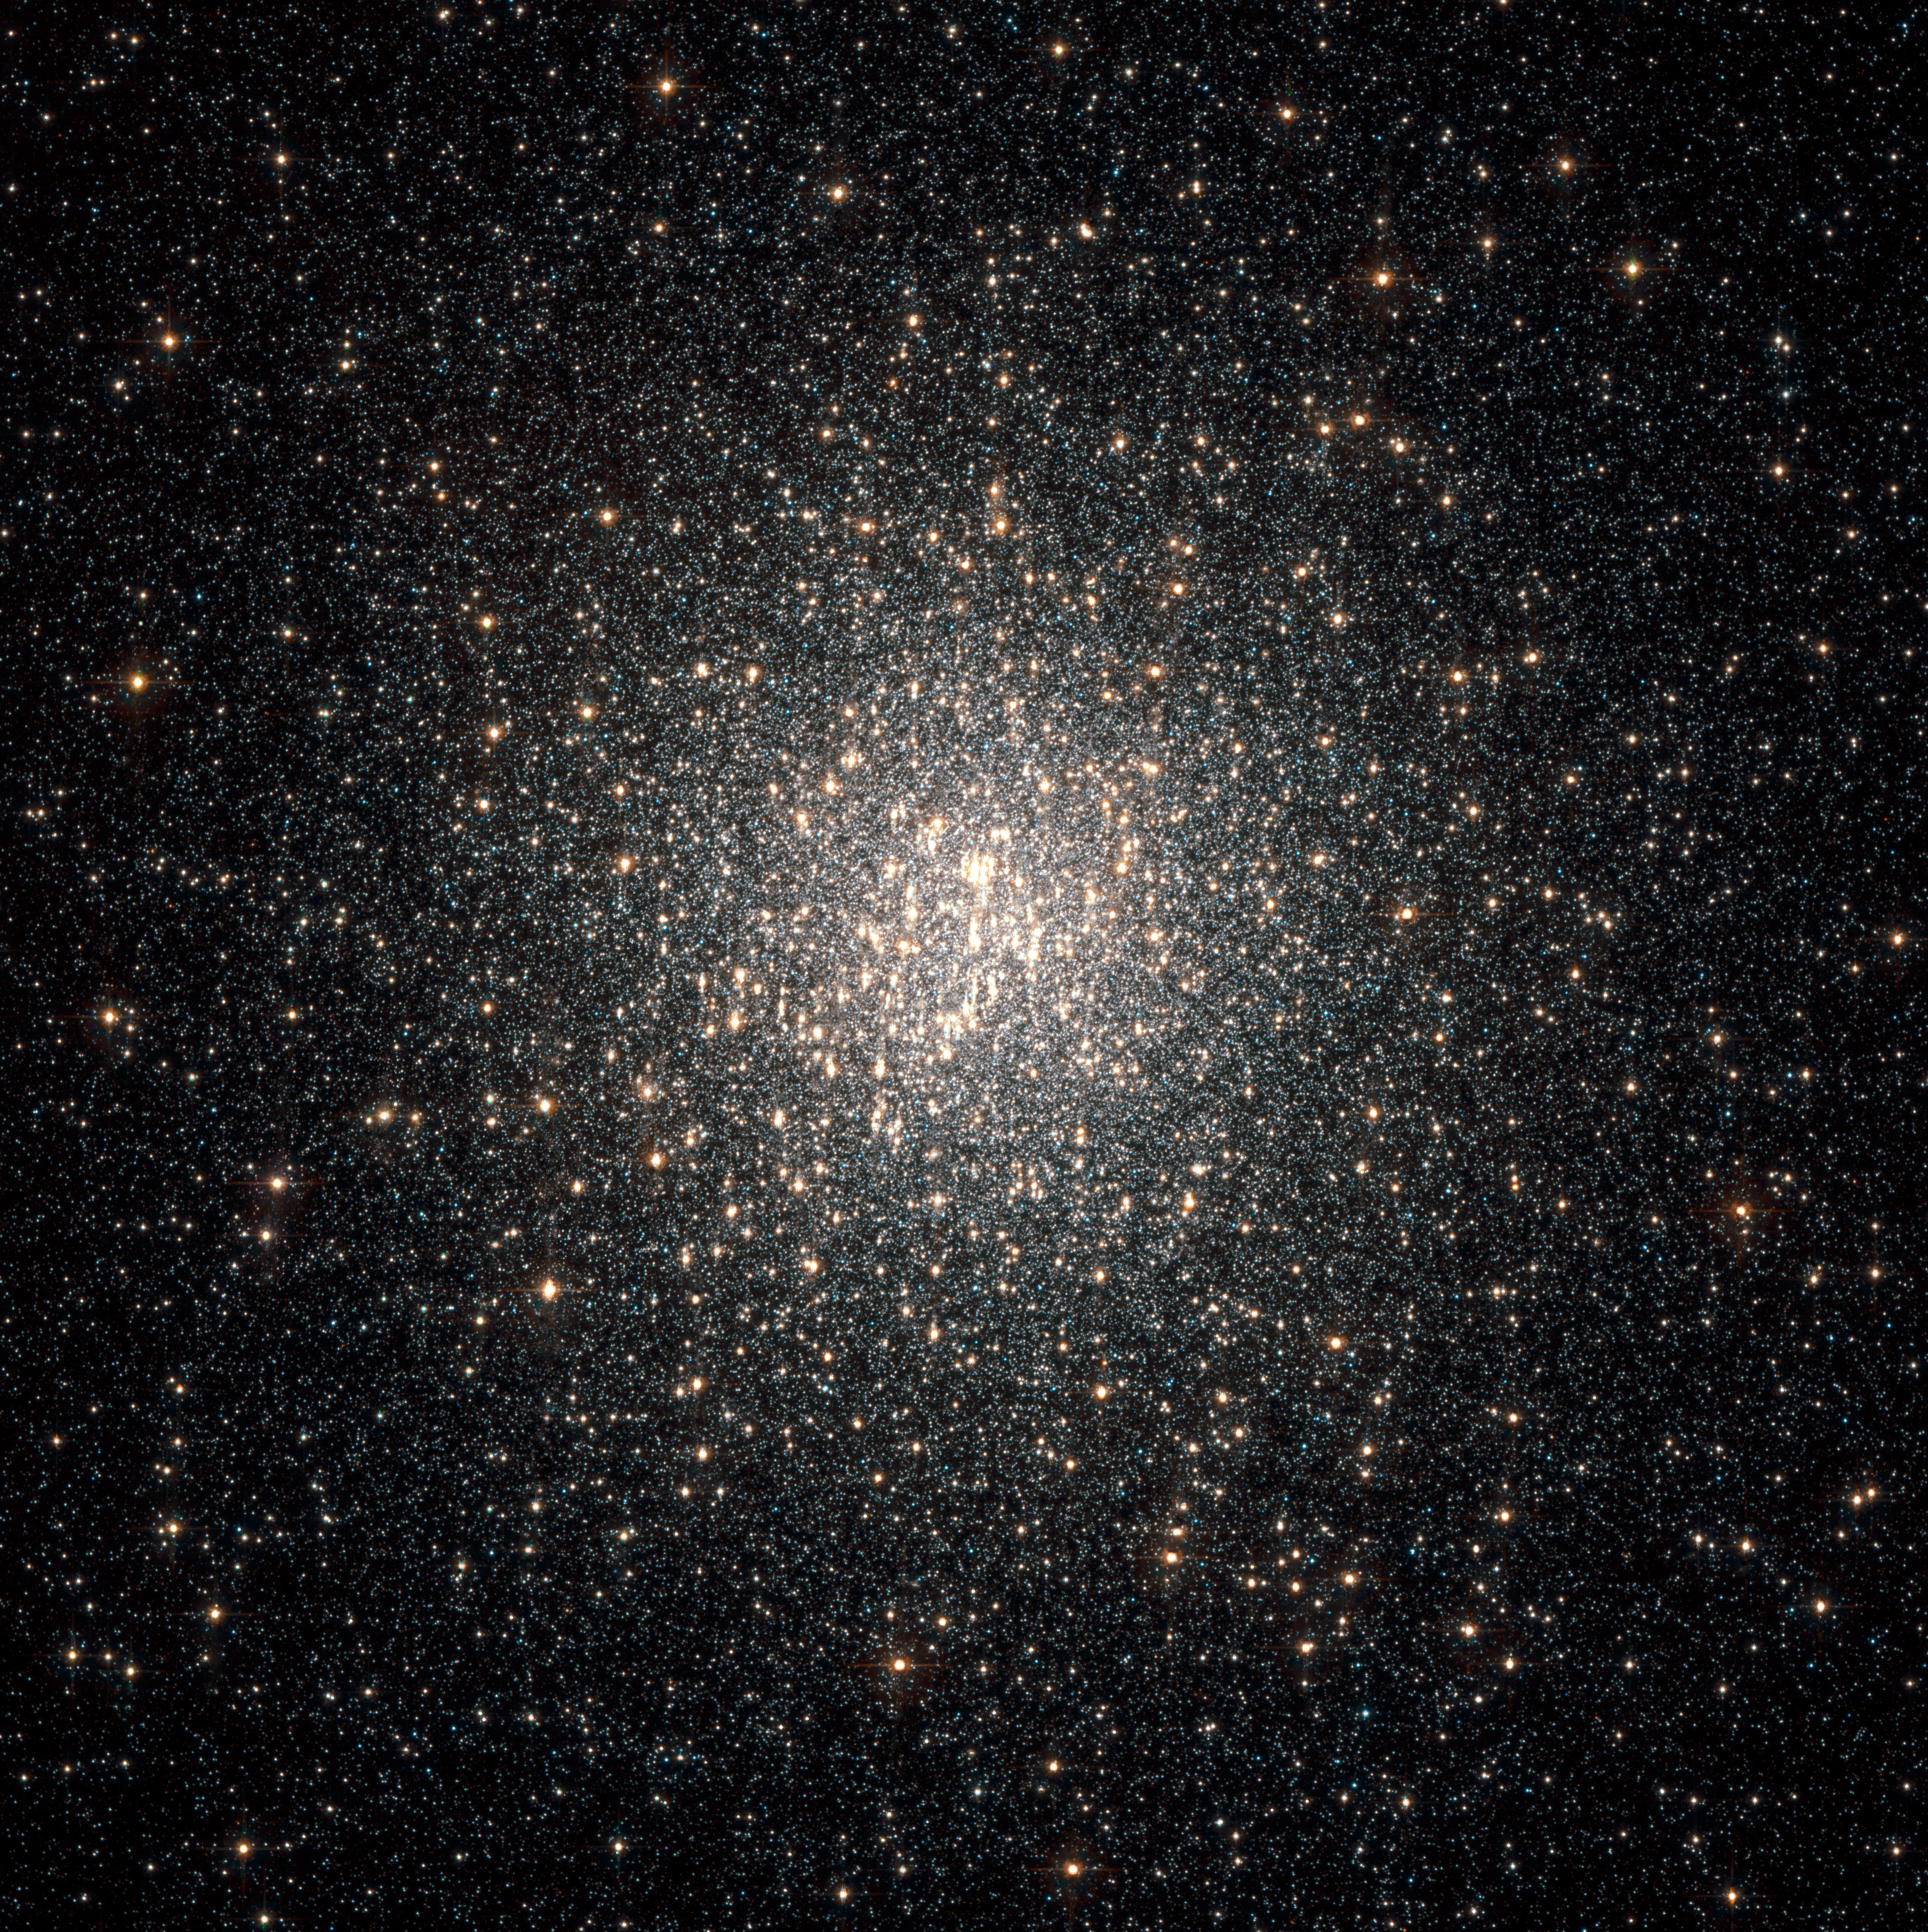

Multiple generations of stars in a globular cluster

This NASA/ESA Hubble Space Telescope image of a dense swarm of stars shows the central region of the globular cluster NGC 2808.

Astronomers were surprised when Hubble spied three generations of cluster stars. The discovery is far different from the standard picture of a globular cluster. For decades, astronomers thought that cluster stars formed at the same time, in the same place, and from the same material, and have co-evolved for billions of years.

Globular clusters are among the earliest settlers of our Milky Way Galaxy, born during our galaxy's formation. They are compact swarms of typically hundreds of thousands of stars held together by gravity.

All the stars in NGC 2808 were born within 200 million years very early in the life of the 12.5-billion-year-old massive cluster. Of the about 150 known globular clusters in our Milky Way Galaxy, NGC 2808 is one of the most massive, containing more than 1 million stars.

The sharp resolution of Hubble's Advanced Camera for Surveys measured the brightness and colours of the cluster stars to find the three stellar populations.

The Hubble images were taken in May 2005 and in August and November 2006.

Credit: European Space Agency, NASA, G. Piotto (University of Padua, Italy) and A. Sarajedini (University of Florida, USA). Acknowledgement: Davide de Martin (ESA/Hubble)